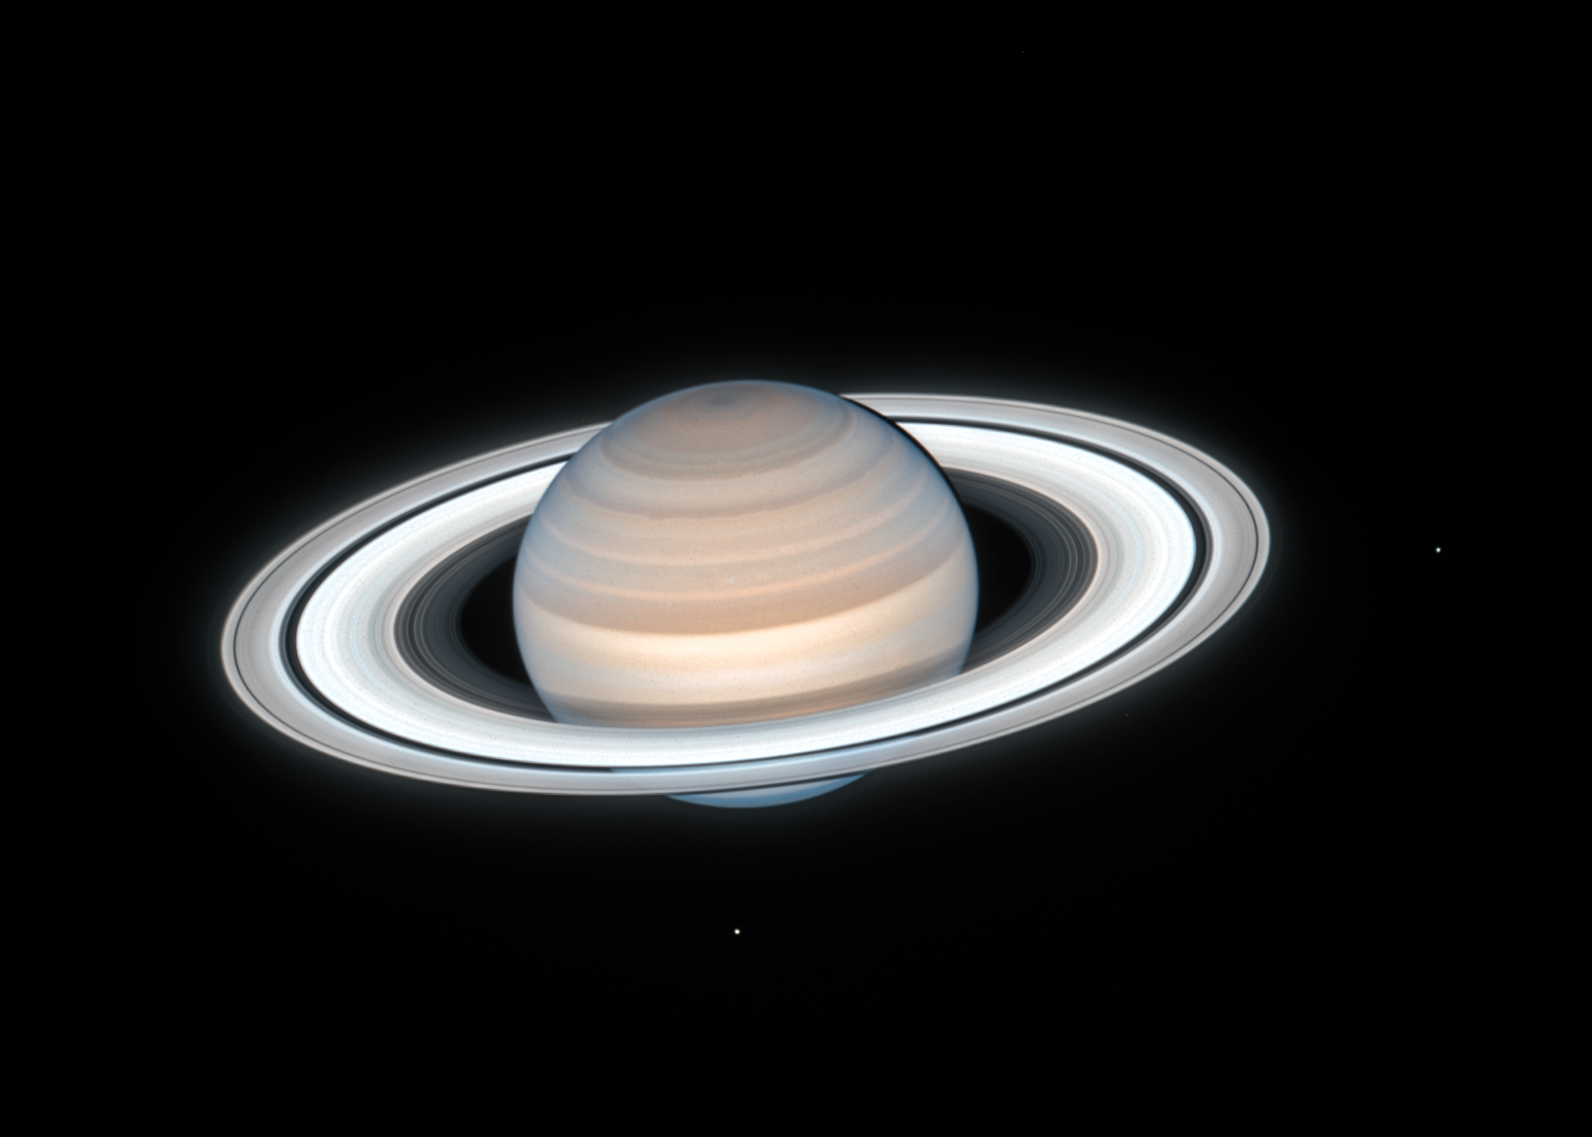

Hubble Sees Summertime on Saturn

This new image from the NASA/ESA Hubble Space Telescope was taken on 4 July, 2020, when the opulent giant world was 1350 million kilometres from Earth. This new Saturn image was taken during summer in the planet's northern hemisphere.

Hubble found a number of small atmospheric storms. These are transient features that appear to come and go with each yearly Hubble observation. The banding in the northern hemisphere remains pronounced as seen in Hubble's 2019 observations, with several bands slightly changing color from year to year. The ringed planet's atmosphere is mostly hydrogen and helium with traces of ammonia, methane, water vapor, and hydrocarbons that give it a yellowish-brown color.

Hubble photographed a slight reddish haze over the northern hemisphere in this color composite. This may be due to heating from increased sunlight, which could either change the atmospheric circulation or perhaps remove ices from aerosols in the atmosphere. Another theory is that the increased sunlight in the summer months is changing the amounts of photochemical haze produced.

Two of Saturn's icy moons are also clearly visible in this exposure: Mimas at right, and Enceladus at bottom.

Credit: NASA, ESA, A. Simon (Goddard Space Flight Center), M.H. Wong (University of California, Berkeley), and the OPAL Team